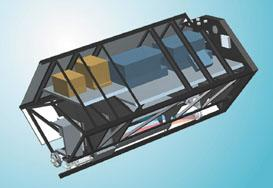

Cosmic origins spectograph

This is an illustration of the Cosmic Origins Spectograph.

Credit: Ball Aerospace